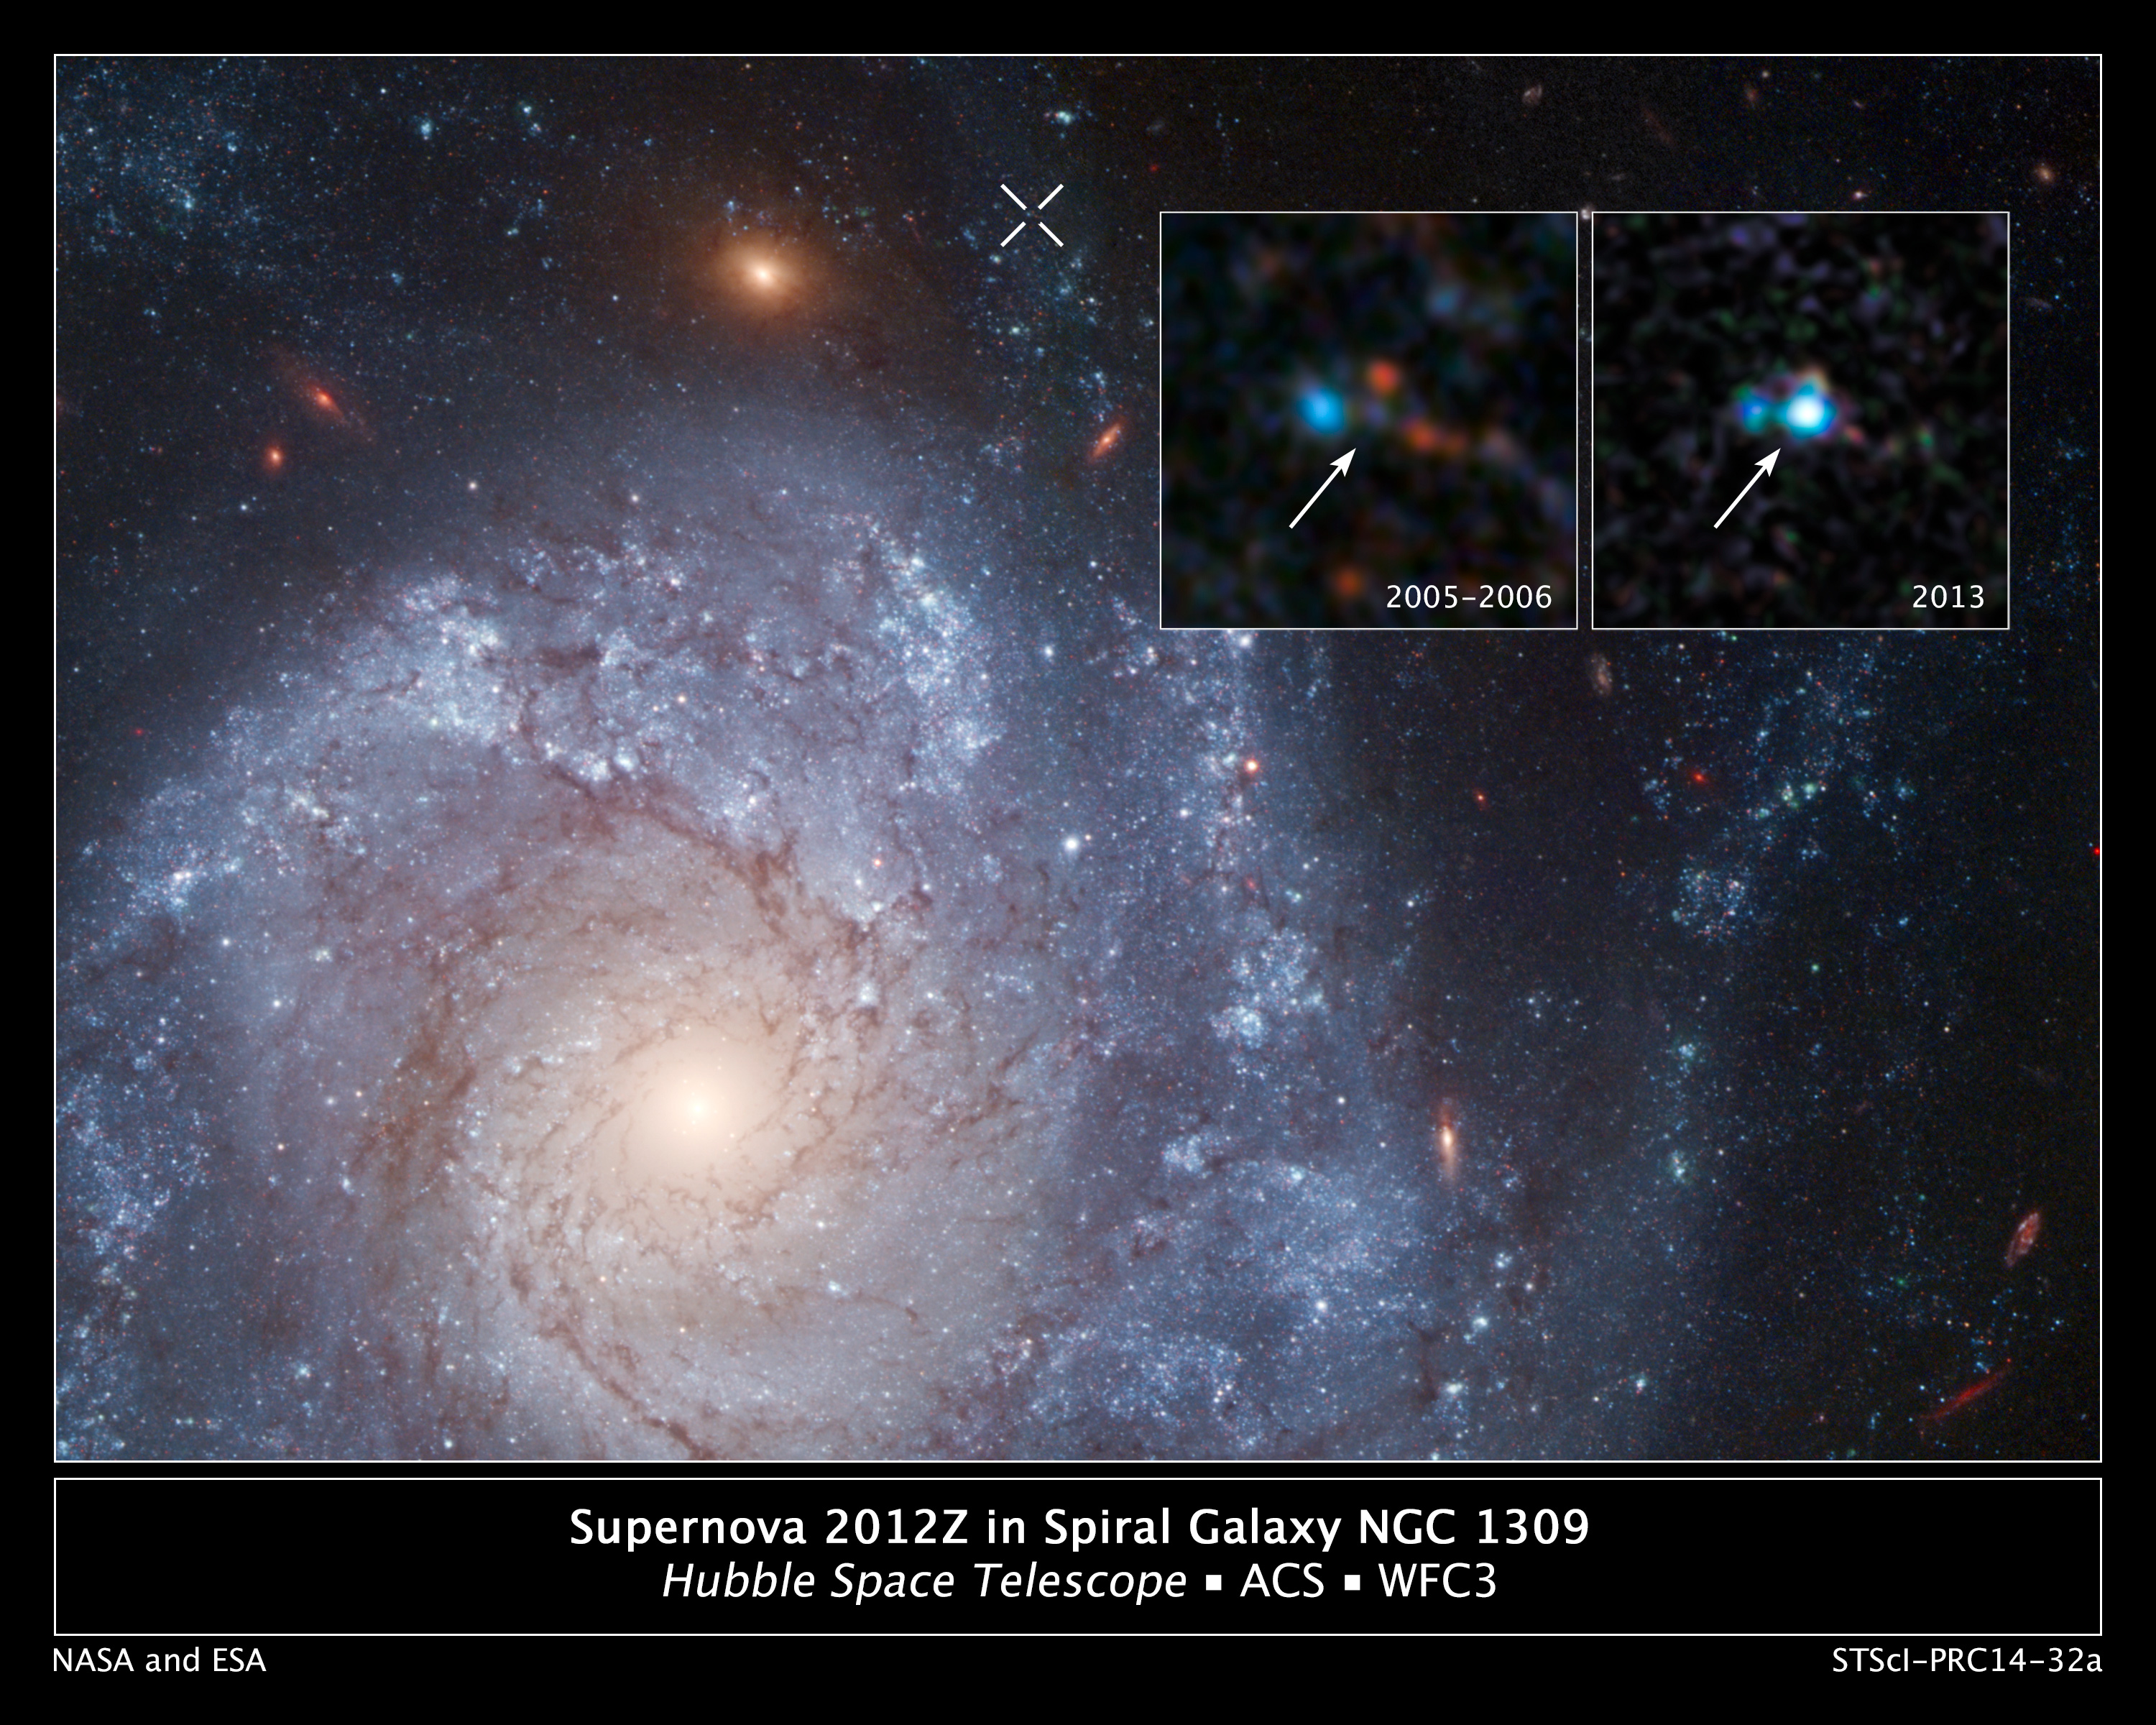

Supernova 2012Z in spiral galaxy NGC 1309, annotated

This image shows spiral galaxy NGC 1309. The inset panel shows a pair of NASA/ESA Hubble Space Telescope images of the galaxy that were taken before and after the appearance of Supernova 2012Z. The white X-shaped feature at the top of the image of the galaxy marks the location of the supernova.

The inset panel from 2013 shows the supernova whilst archival Hubble data from 2005 and 2006 show the progenitor system for the supernova, thought to be a binary system containing a helium star transferring material to a white dwarf that exploded.

The stellar blast is a member of a unique class of supernova called Type Iax. These supernovae are less energetic, and hence fainter on average, than their well-known cousins Type Ia supernovae, which also originate from exploding white dwarfs in binary systems.

Credit: NASA, ESA, C. McCully and S. Jha (Rutgers University), R. Foley (University of Illinois), and Z. Levay (STScI) Acknowledgment: Hubble Heritage Team (STScI/AURA), and A. Riess (JHU/STScI)